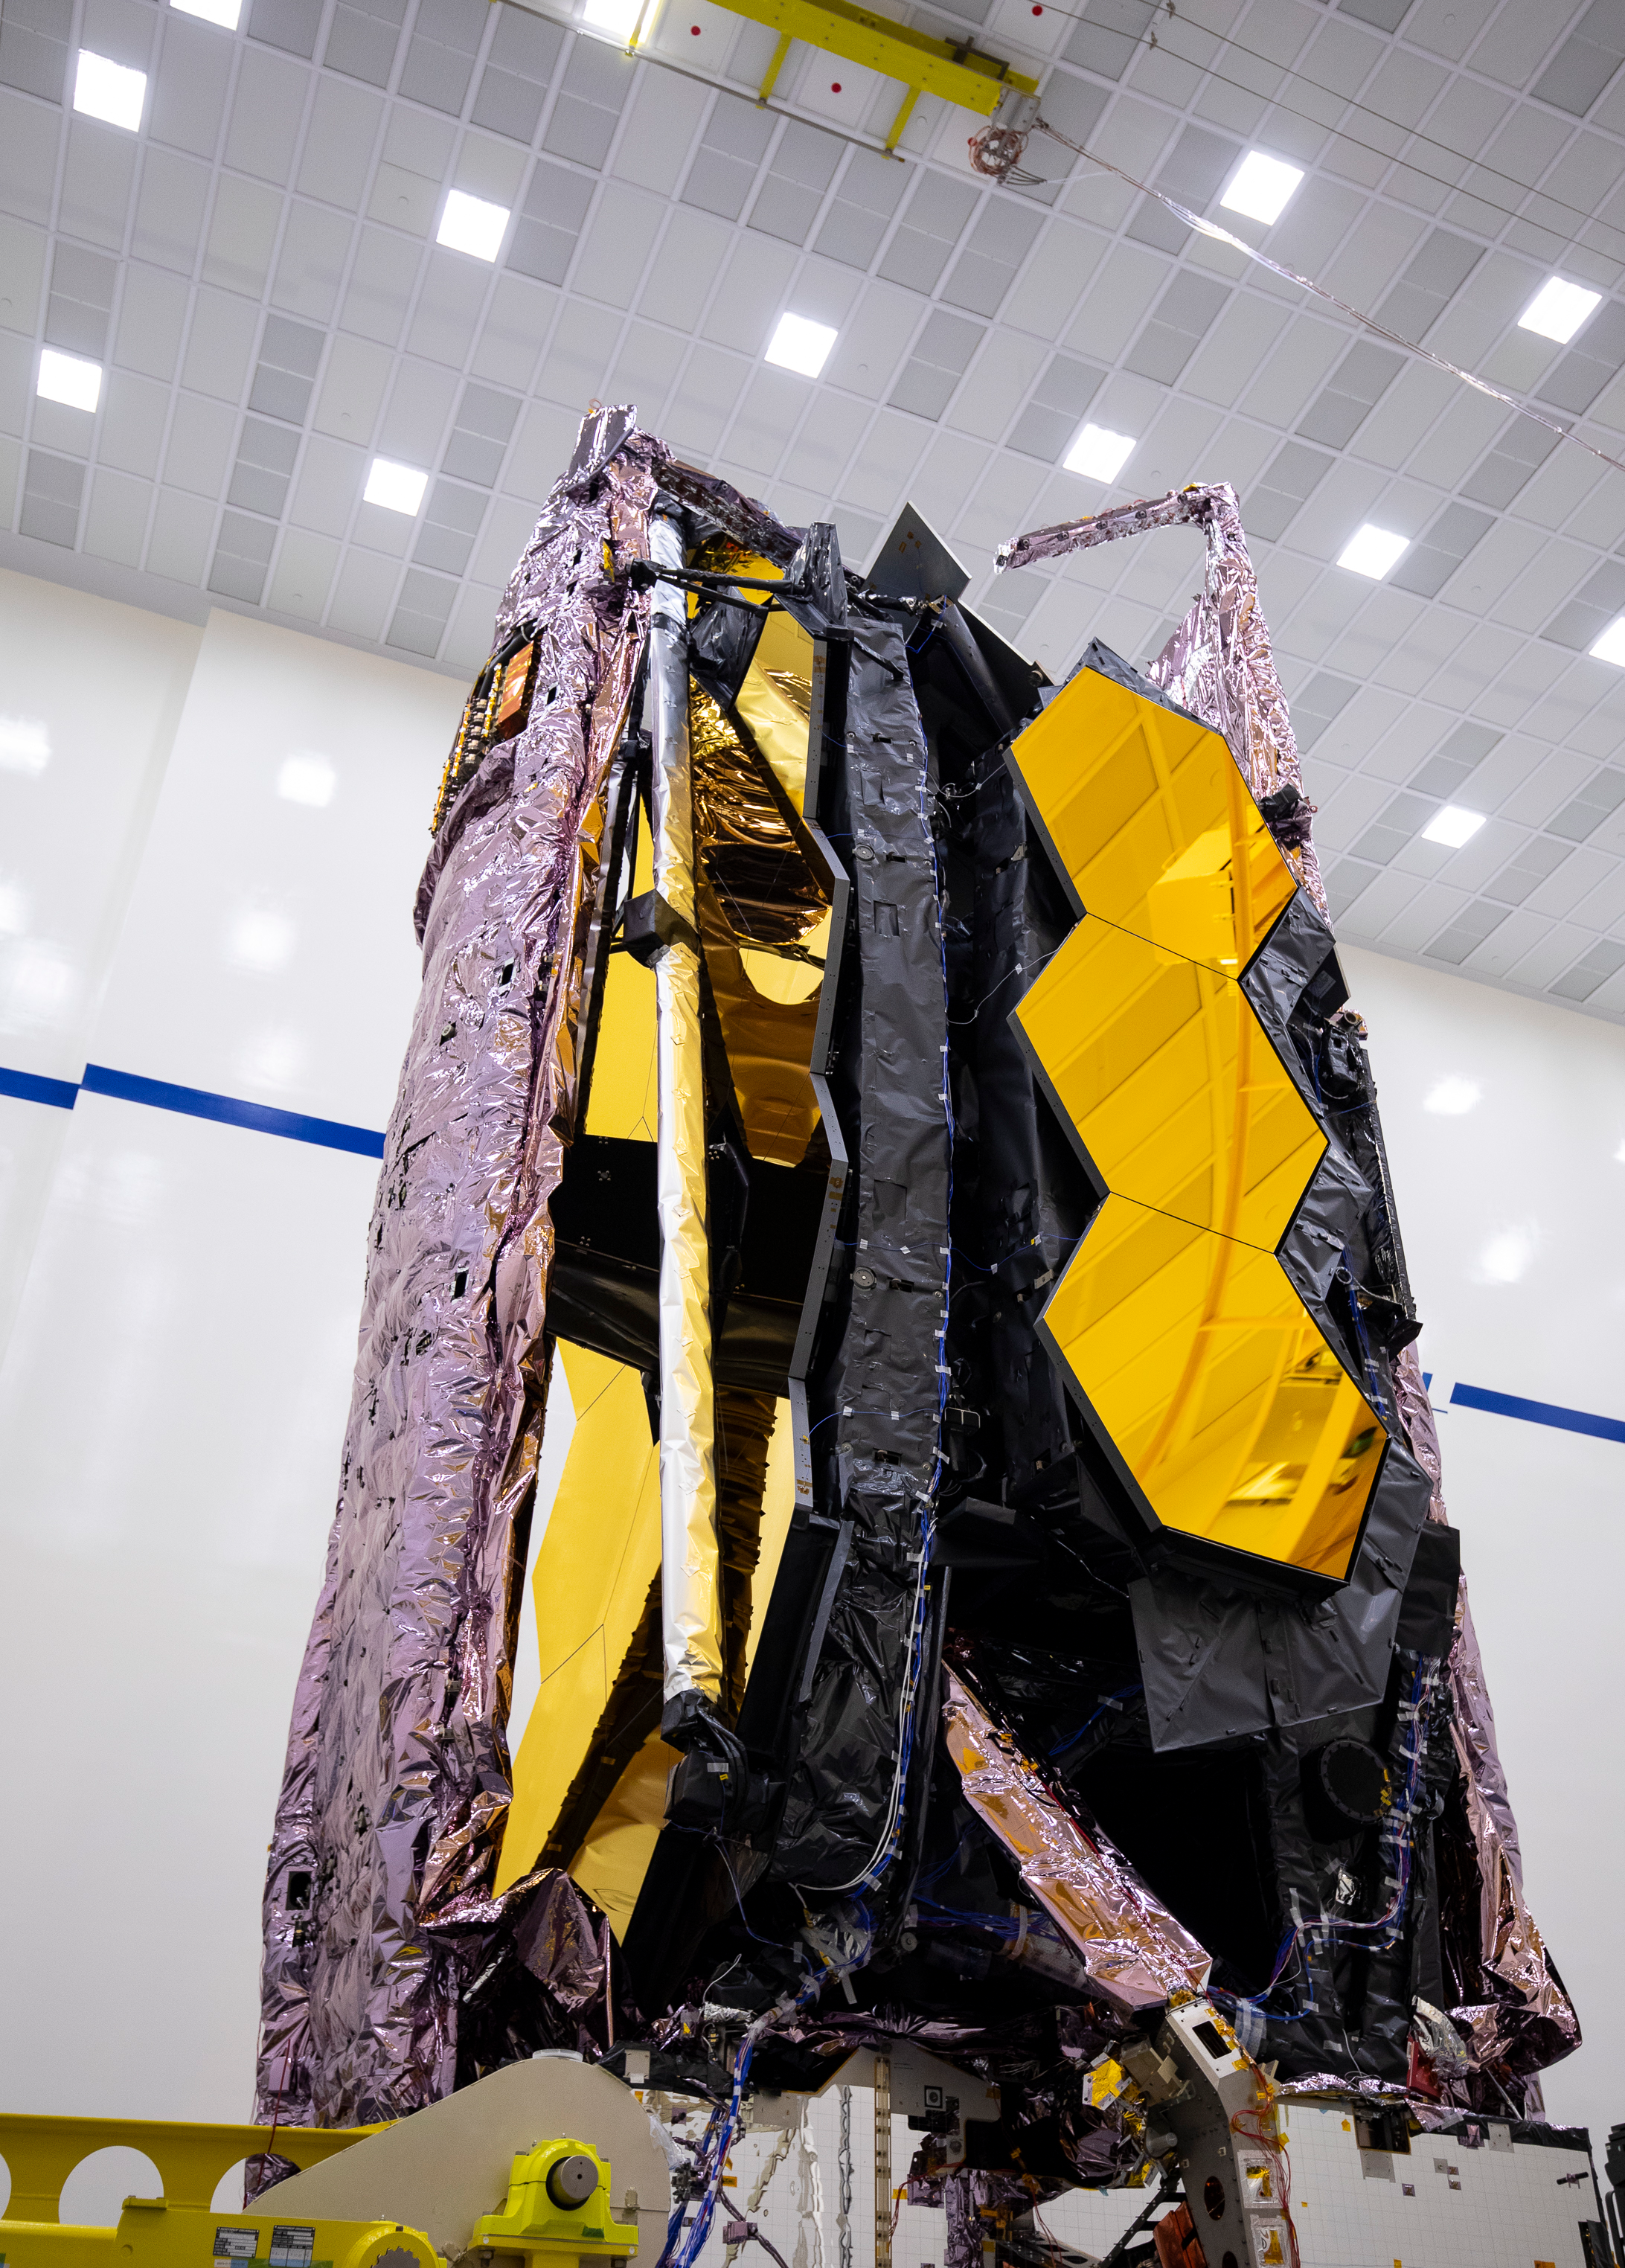

Stowed JWST at Northrop Gruman

This image shows the fully stowed JWST in Northrop Grumman’s cleanroom facility in Redondo Beach, CA.

Credit: Northrop Grumman